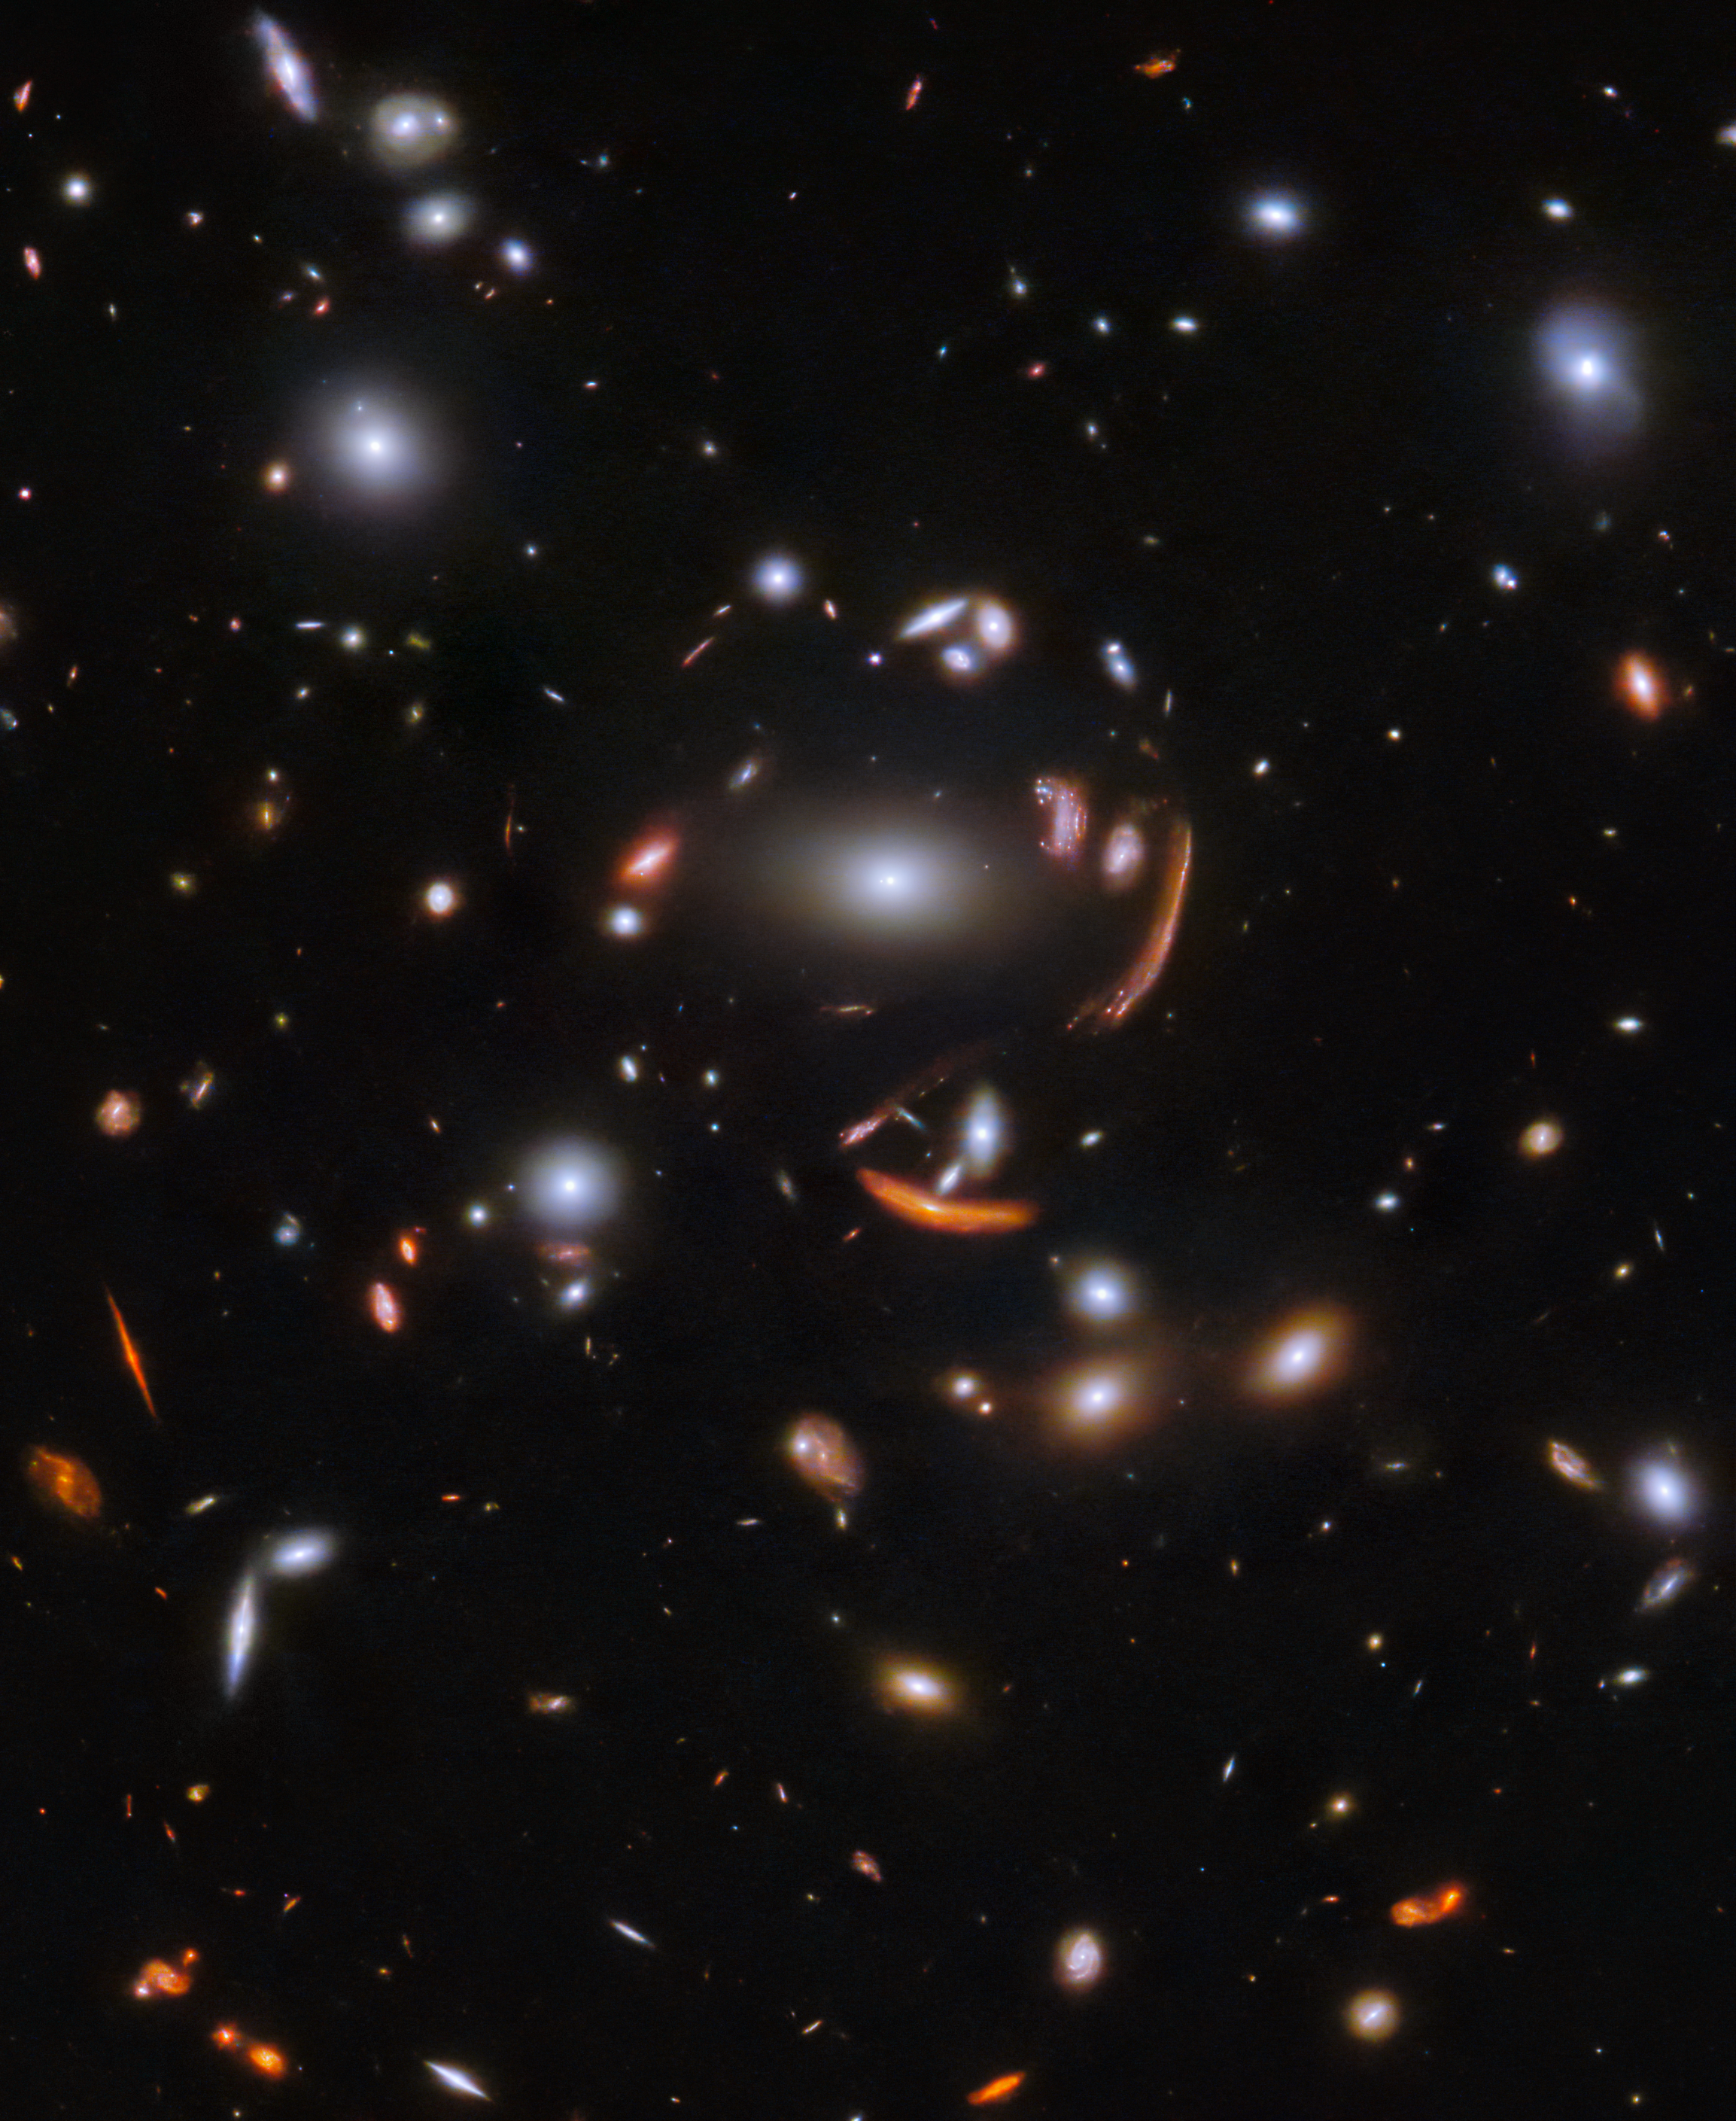

Galactic gathering

The vast galaxy cluster SDSS J1226+2152 in the constellation Coma Berenices is distorting the images of distant background galaxies into streaks and smears of light in this image from the NASA/ESA/CSA James Webb Space Telescope. This is a spectacular example of gravitational lensing, a phenomenon which occurs when a massive celestial object such as a galaxy cluster deforms spacetime and causes the path of light from more distant galaxies to be deflected, almost as if a monumental lens was redirecting it. This image is from a set of early science observations with Webb.

One of the most notable lensed galaxies in this rich field is named SGAS J12265.3+215220. In this image, it's the innermost lensed galaxy, just above and to the right of the central galaxy. This lies far beyond the foreground cluster in distance, giving us a view into the galaxy roughly two billion years after the big bang. Astronomers are now using this eagerly-awaited hoard of bright, gravitationally-lensed galaxies from Webb to explore star formation in distant galaxies.

Just like their optical namesakes, gravitational lenses can magnify as well as distort distant galaxies. This allows astronomers to observe the finer details of galaxies that would usually be too distant to clearly resolve. In the case of SGAS J122651.3+215220, the combination of gravitational lensing and Webb’s unprecedented observational capabilities will allow astronomers to measure where, and how fast, stars are forming and also to gain an insight into the environments which support star formation in lensed galaxies.

Amid this spectacular display of gravitational lensing, a menagerie of spiral and elliptical galaxies in all shapes and sizes surround the galaxy cluster. Webb’s sensitive infrared instruments have proven prodigious in picking out distant galaxies from the darkness of space. None of the tiny pinpricks in the patch of sky captured here is a star: each one is a galaxy. The variety of colours of the small, dim galaxies gives us hints at what we are seeing: many of the paler white galaxies will date back to the period of intense star formation known as cosmic noon, some two to three billion years after the big bang, while the few small orange and red systems are probably from even earlier in the Universe's history.

Credit: ESA/Webb, NASA & CSA, J. Rigby and the JWST TEMPLATES team